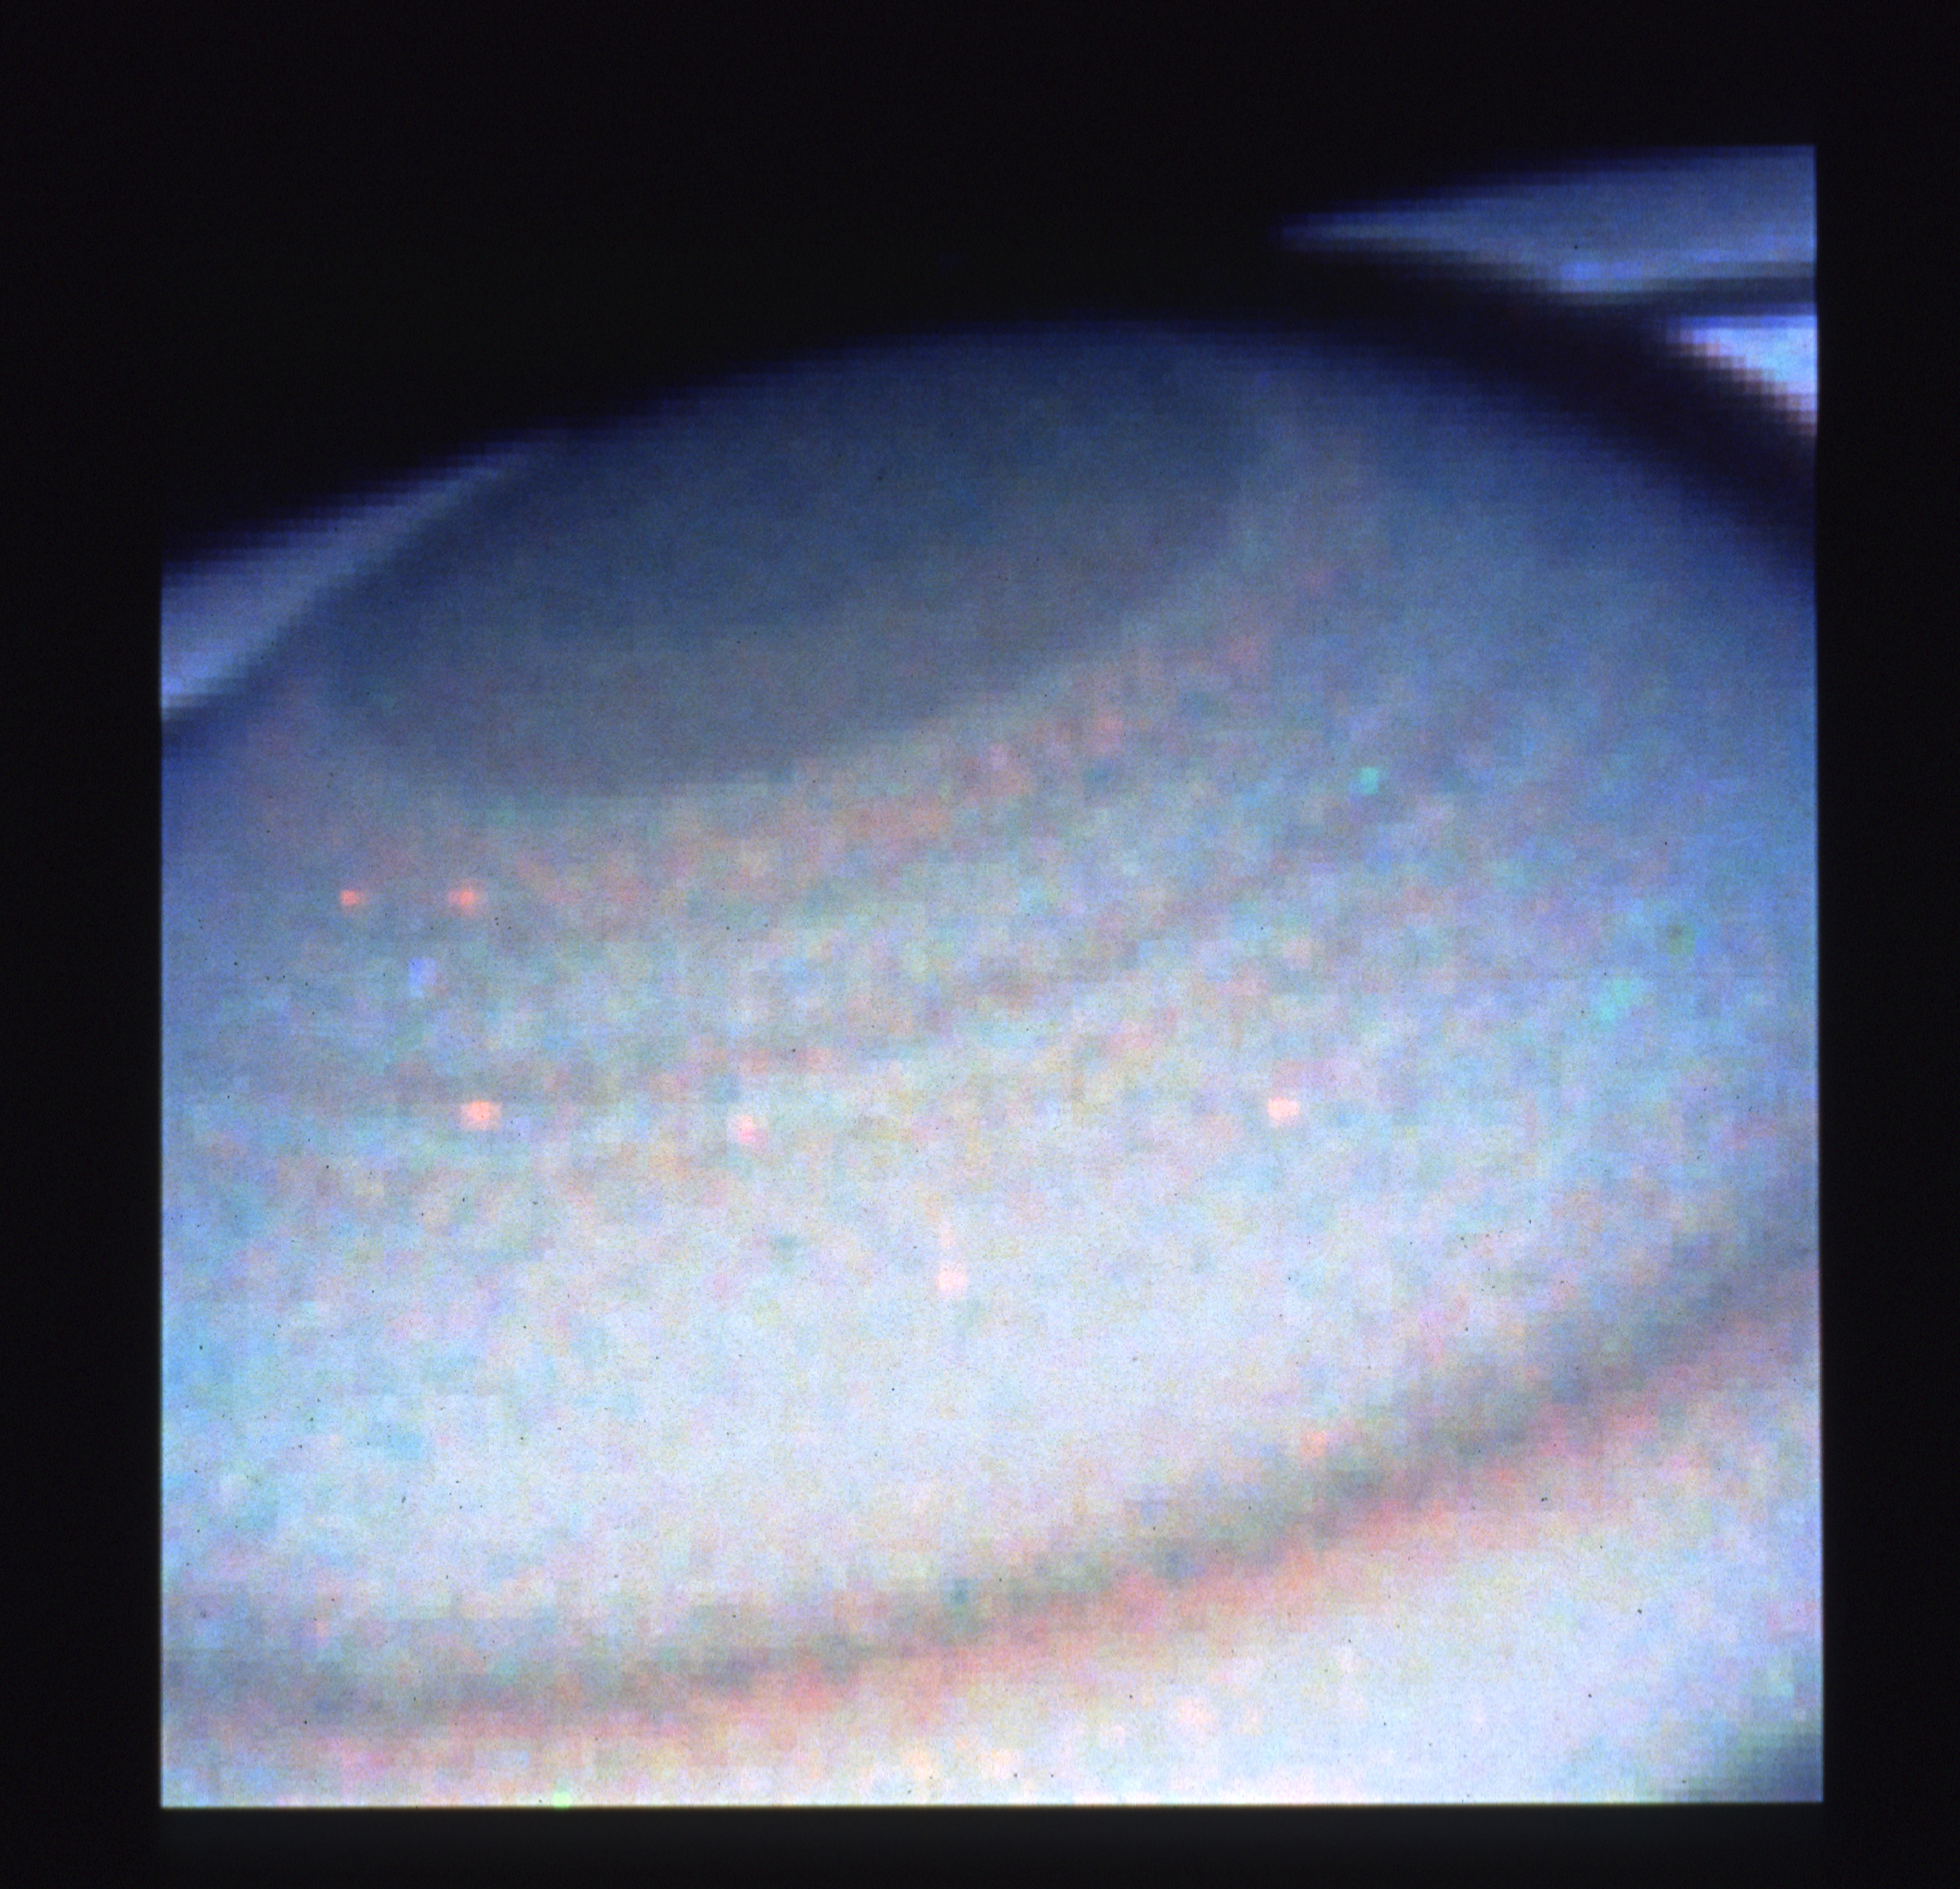

Saturn's north polar hood

This enlargment of the Saturn image reveals unprecedented detail in atmospheric features at the northern polar hood. Saturn's north pole is presently tilted toward Earth by 24 degrees.

Credit: NASA/ESA